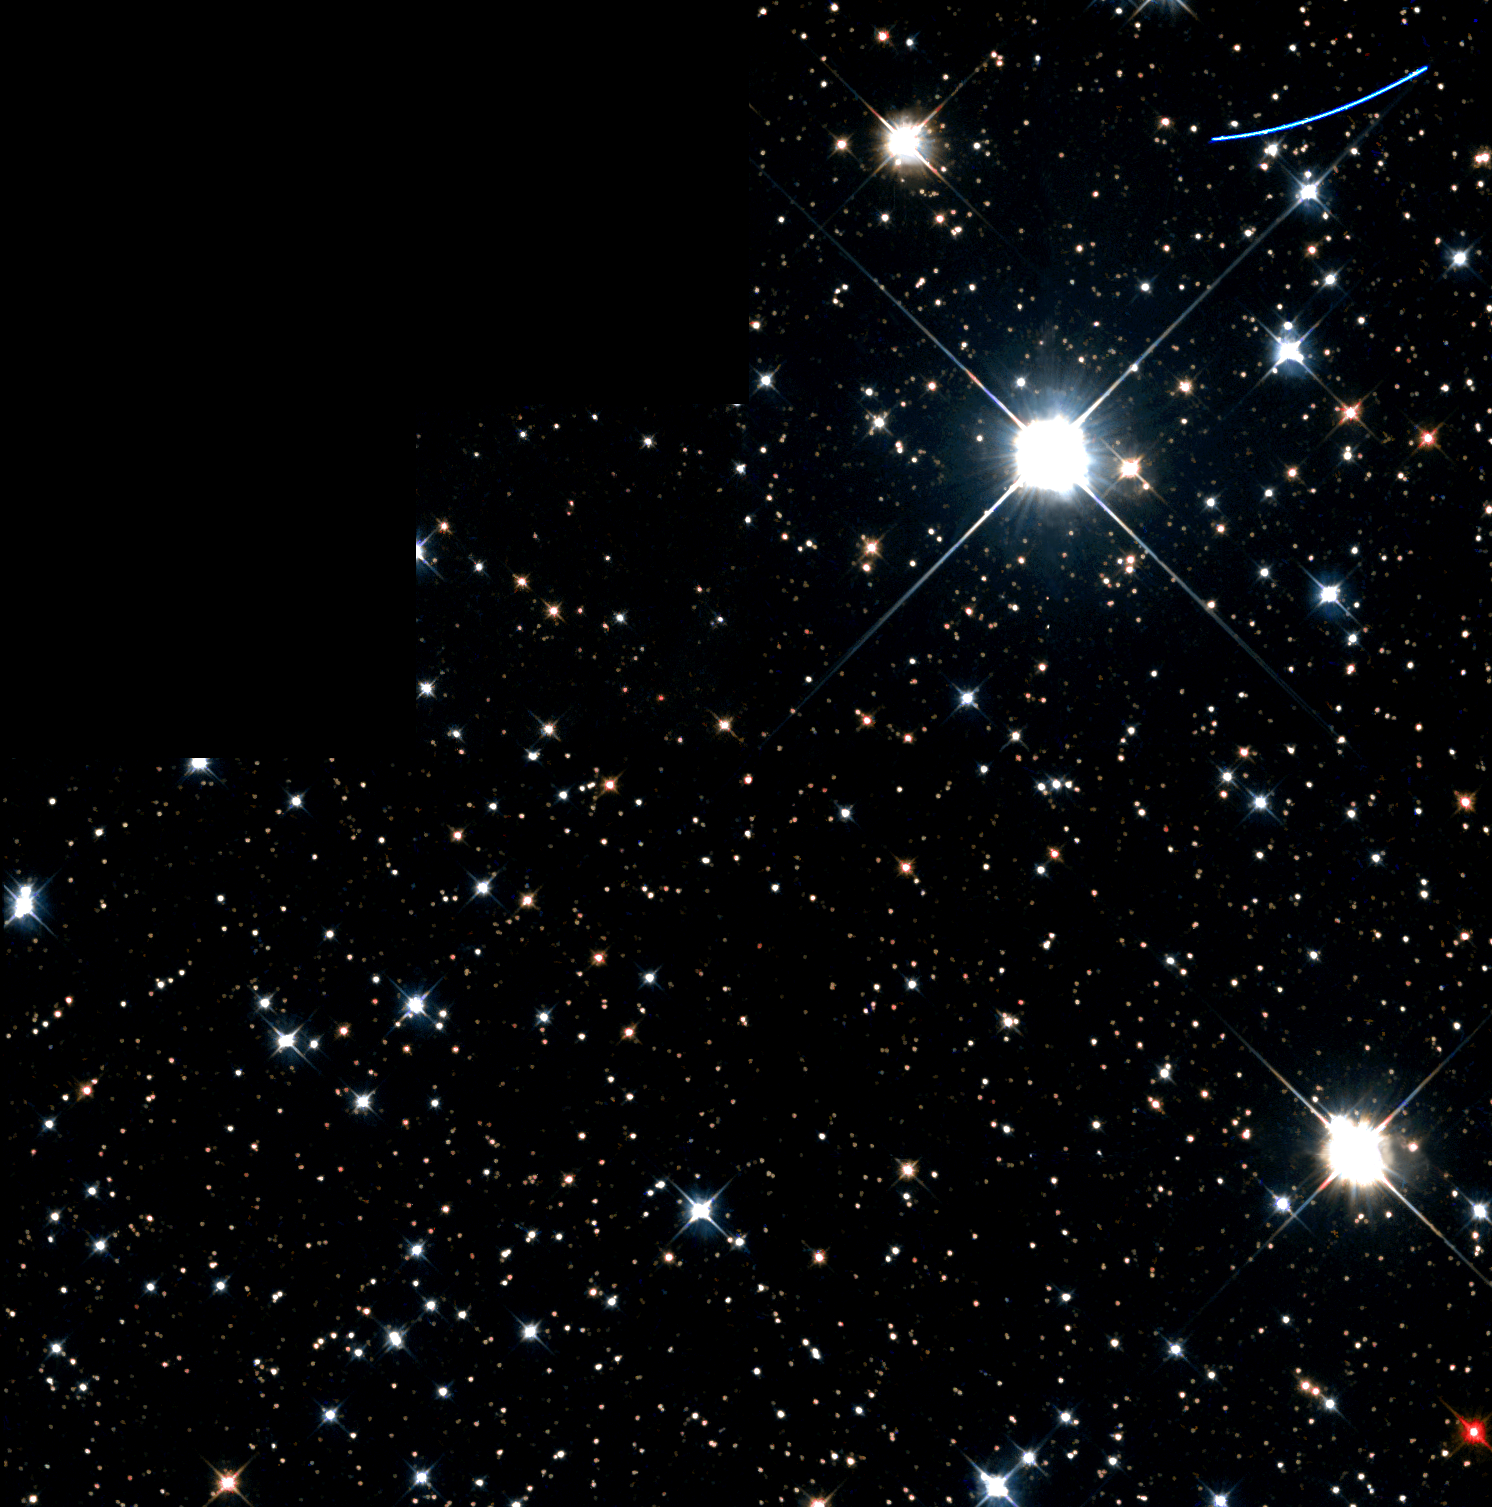

A Mote in Hubble's Eye

On April 6, 1994 the NASA/ESA Hubble Space Telescope (HST) was performing a detailed study of the Sun's nearest stellar neighbor, Proxima Centauri, using the Fine Guidance Sensors to search for small deviations in the position of Proxima Centauri that could reveal the presence of an unseen planetary companion.

Rather than sit idle while this study went on, the Wide Field and Planetary Camera 2 (WFPC2) was activated using the observing strategy set out in a program initiated by Dr. Ed Groth (Princeton University) designed to make use of this otherwise wasted time.

The image captured by this WFPC2 parallel observation is a typical Milky Way star field in the constellation Centaurus. Such images can be used to study the evolution of stars that make up our galaxy.

Credit: Hubble Heritage Team (AURA/STScI/NASA/ESA)